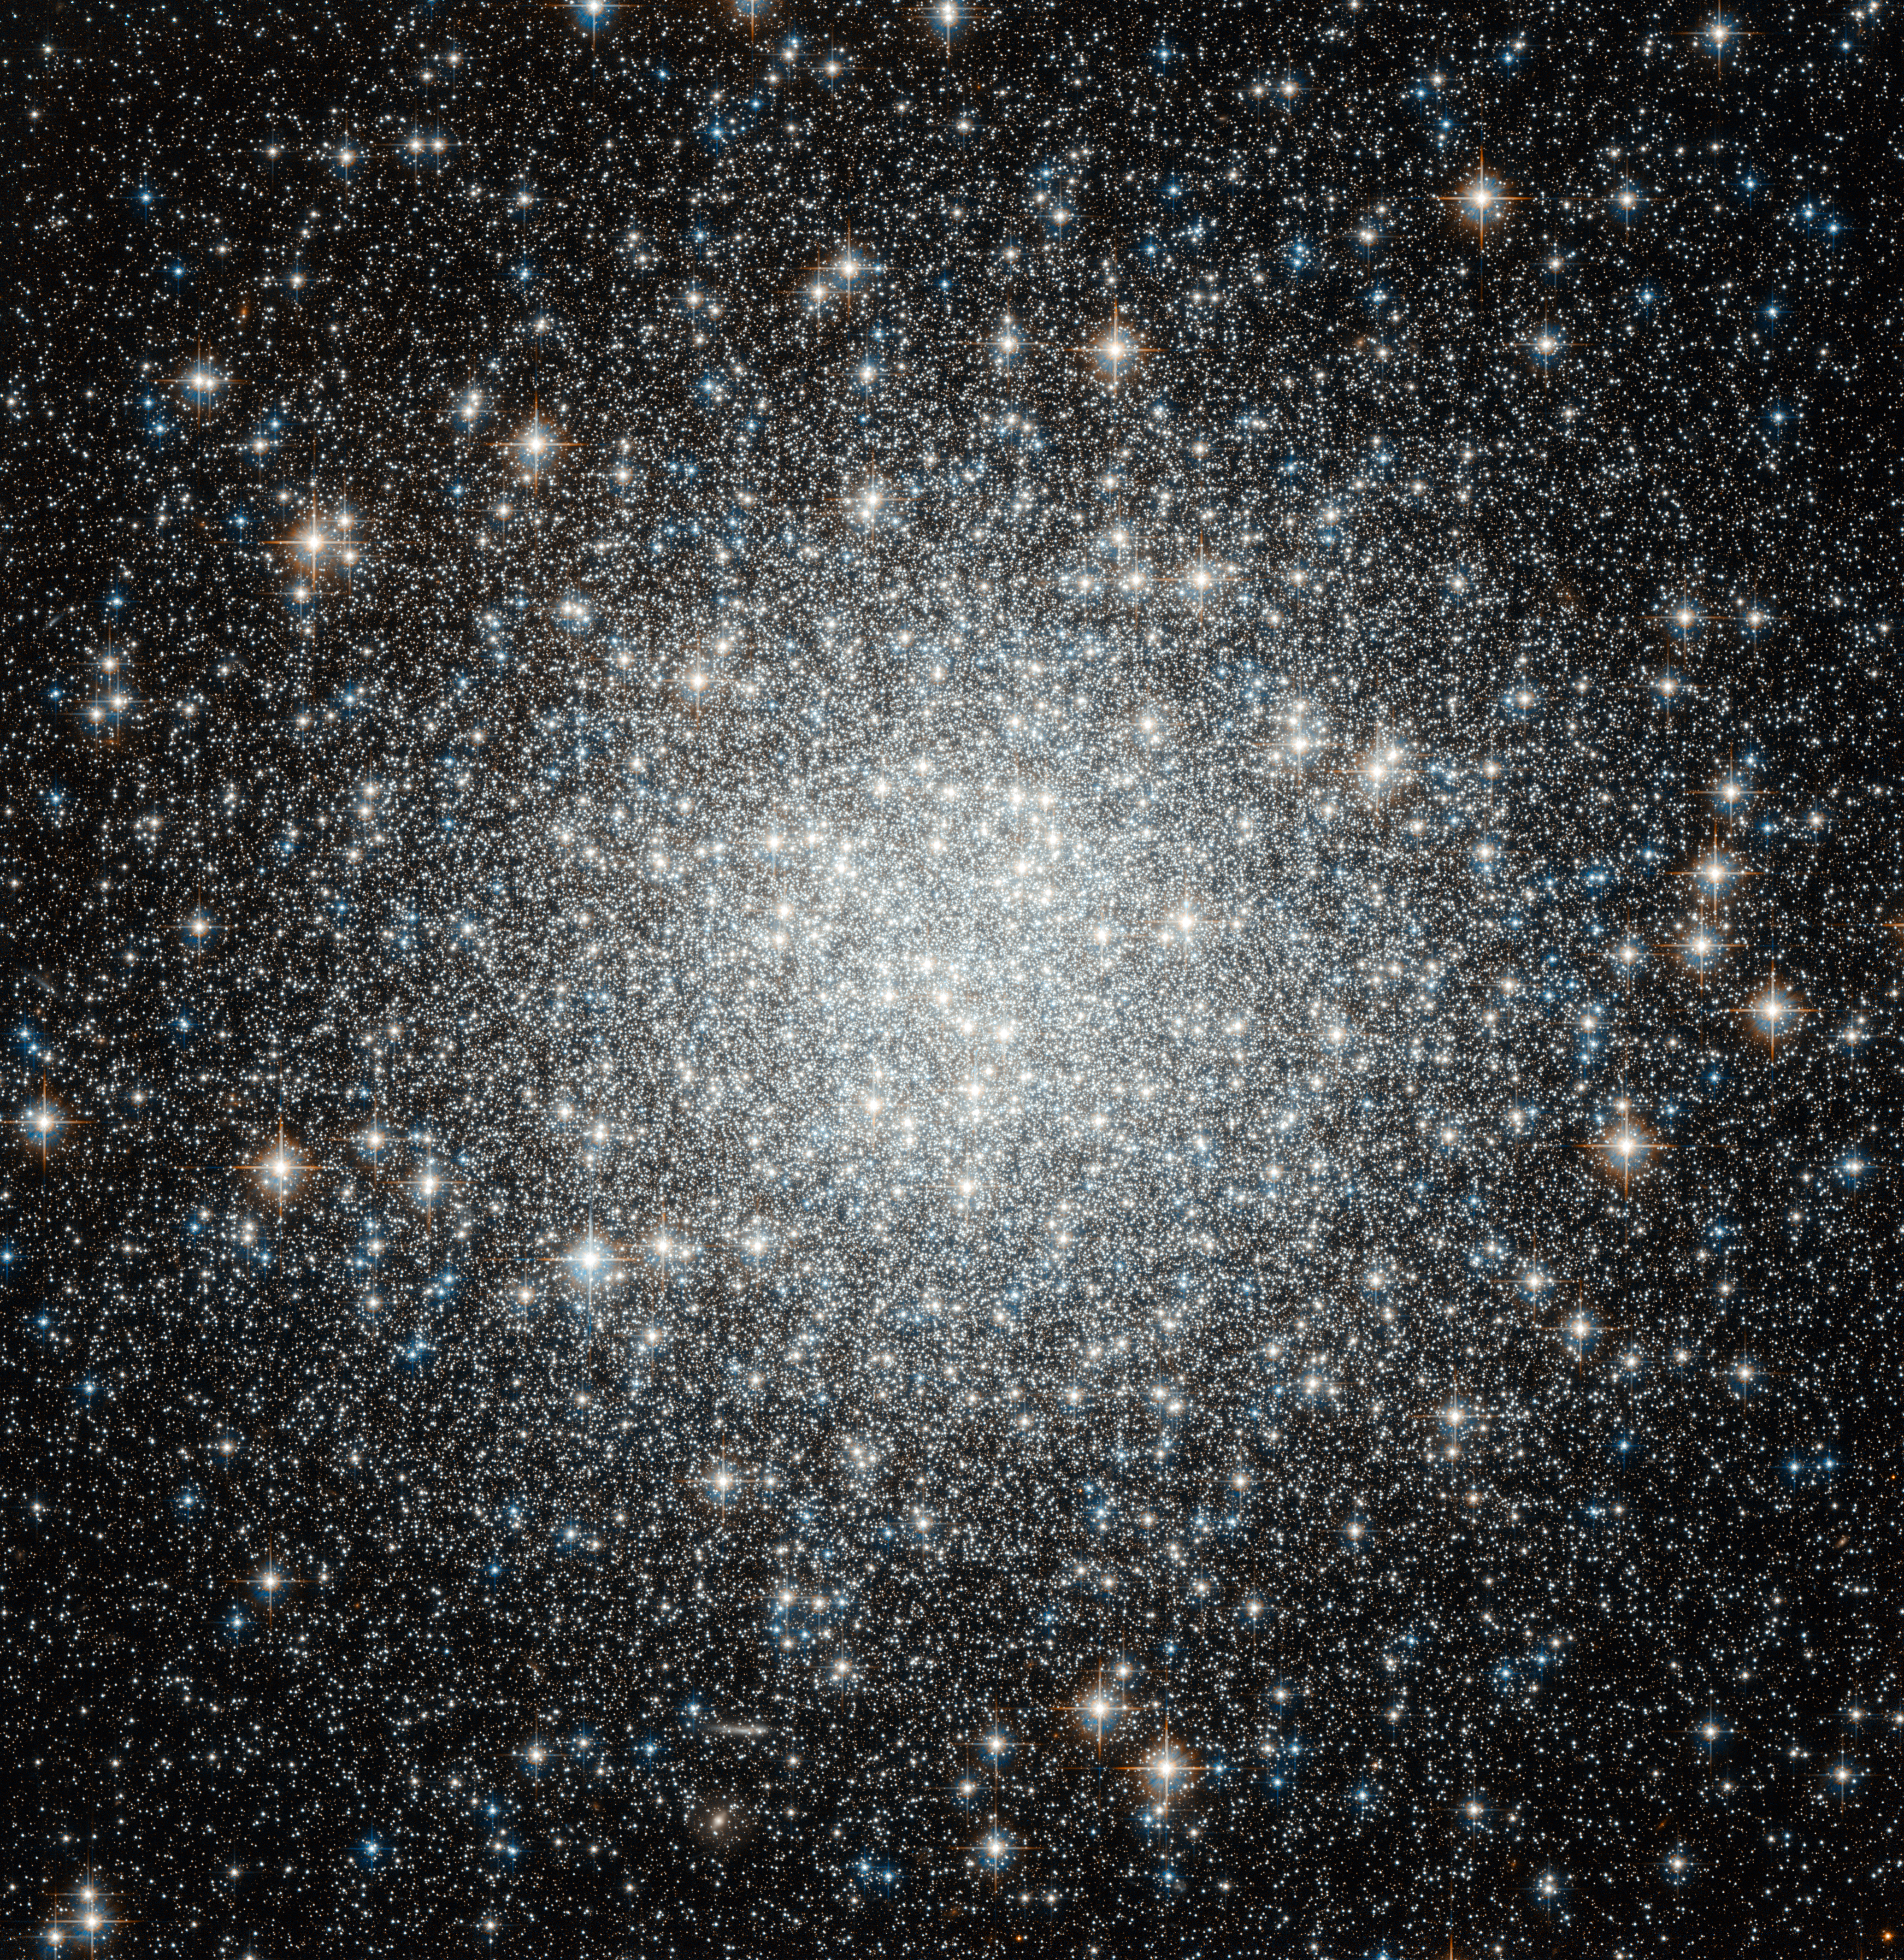

Spot the difference — Hubble spies another globular cluster, but with a secret

Thousands and thousands of brilliant stars make up this globular cluster, Messier 53, captured with crystal clarity in this image from the NASA/ESA Hubble Space Telescope. Bound tightly by gravity, the cluster is roughly spherical and becomes denser towards its heart.

These enormous sparkling spheres are by no means rare, and over 150 exist in the Milky Way alone, including Messier 53. It lies on the outer edges of the galaxy, where many other globular clusters are found, almost equally distant from both the centre of our galaxy and the Sun. Although they are relatively common, the famous astronomer William Herschel, not at all known for his poetic nature, once described a globular cluster as “one of the most beautiful objects I remember to have seen in the heavens”, and it is clear to see why.

Globular clusters are much older and larger than open clusters, meaning they are generally expected to contain more old red stars and fewer massive blue stars. But Messier 53 has surprised astronomers with its unusual number of a type of star called blue stragglers.

These youngsters are rebelling against the theory of stellar evolution. All the stars in a globular cluster are expected to form around the same time, so they are expected follow a specific trend set by the age of the cluster and based on their mass. But blue stragglers don’t follow that rule; they appear to be brighter and more youthful than they have any right to be. Although their precise nature remains mysterious these unusual objects are probably formed by close encounters, possibly collisions, between stars in the crowded centres of globular clusters.

This picture was put together from visible and infrared exposures taken with the Wide Field Channel of Hubble's Advanced Camera for Surveys.The field of view is approximately 3.4 arcminutes across.

Credit: ESA/Hubble & NASA